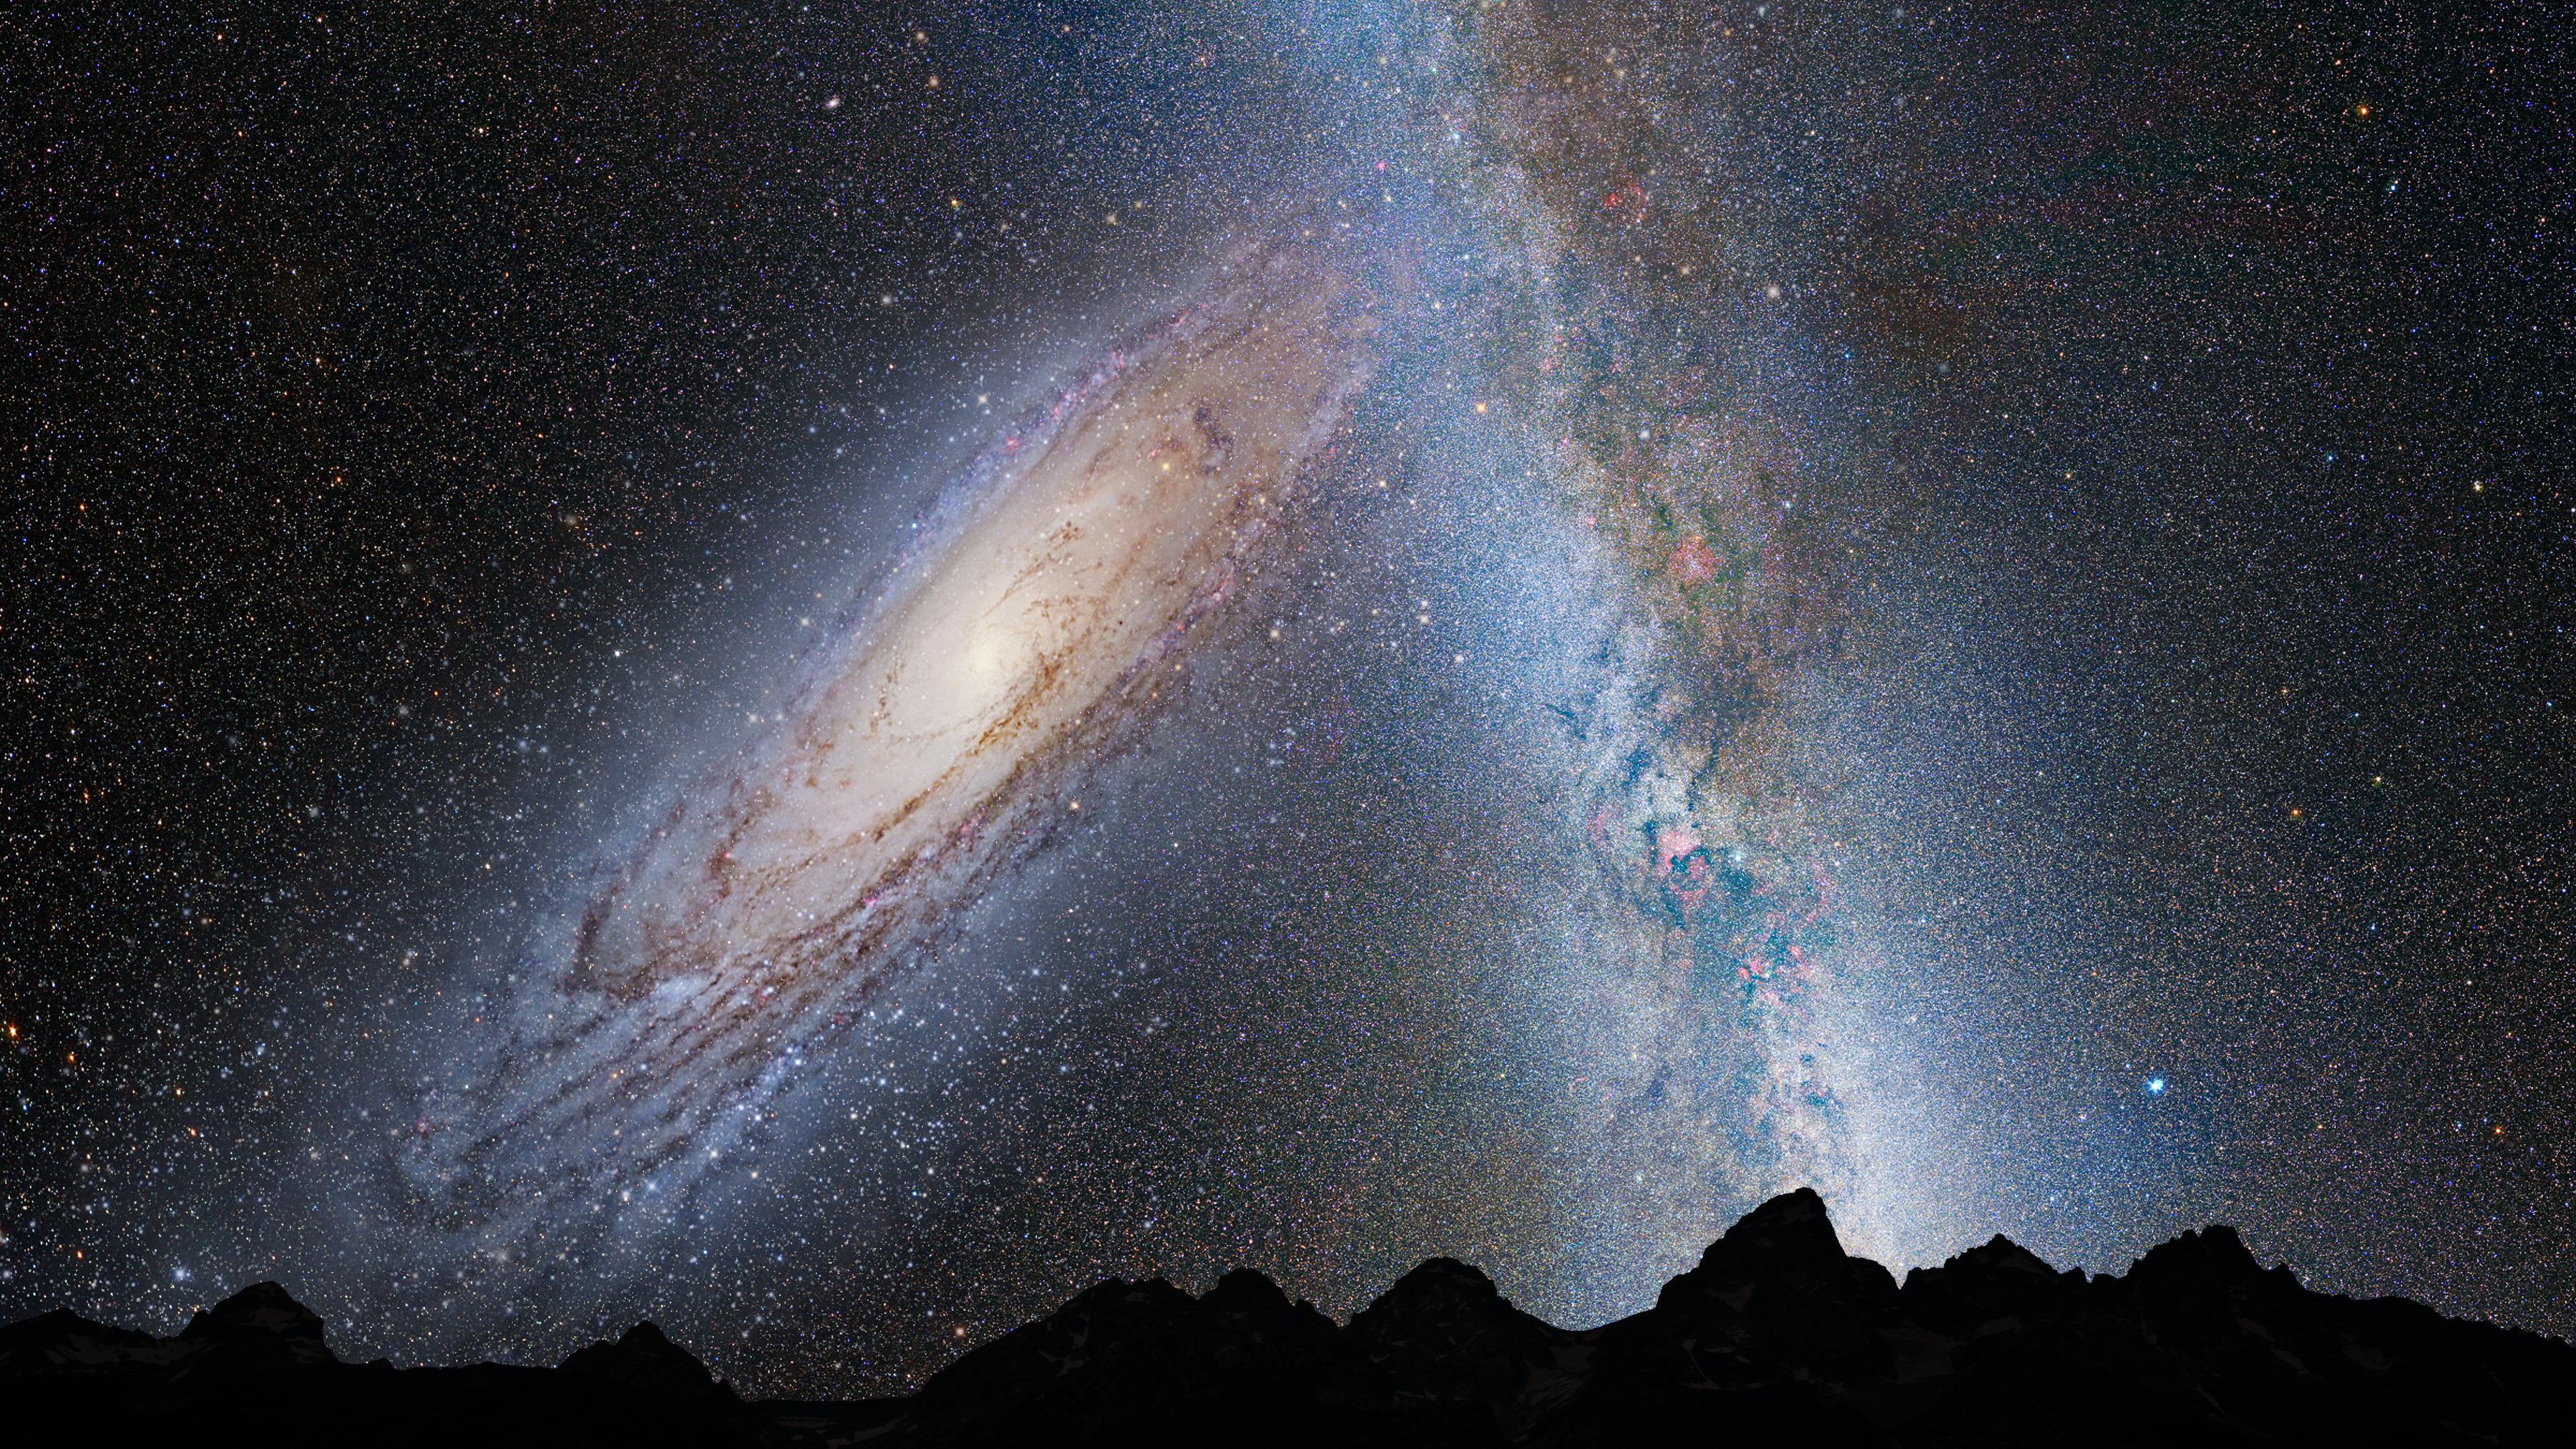

Nighttime Sky View of Future Galaxy Merger: 3.75 Billion Years

Andromeda fills the field of view. The Milky Way begins to show distortion due to tidal pull from Andromeda.

Credit: NASA, ESA, Z. Levay and R. van der Marel (STScI), T. Hallas, and A. Mellinger